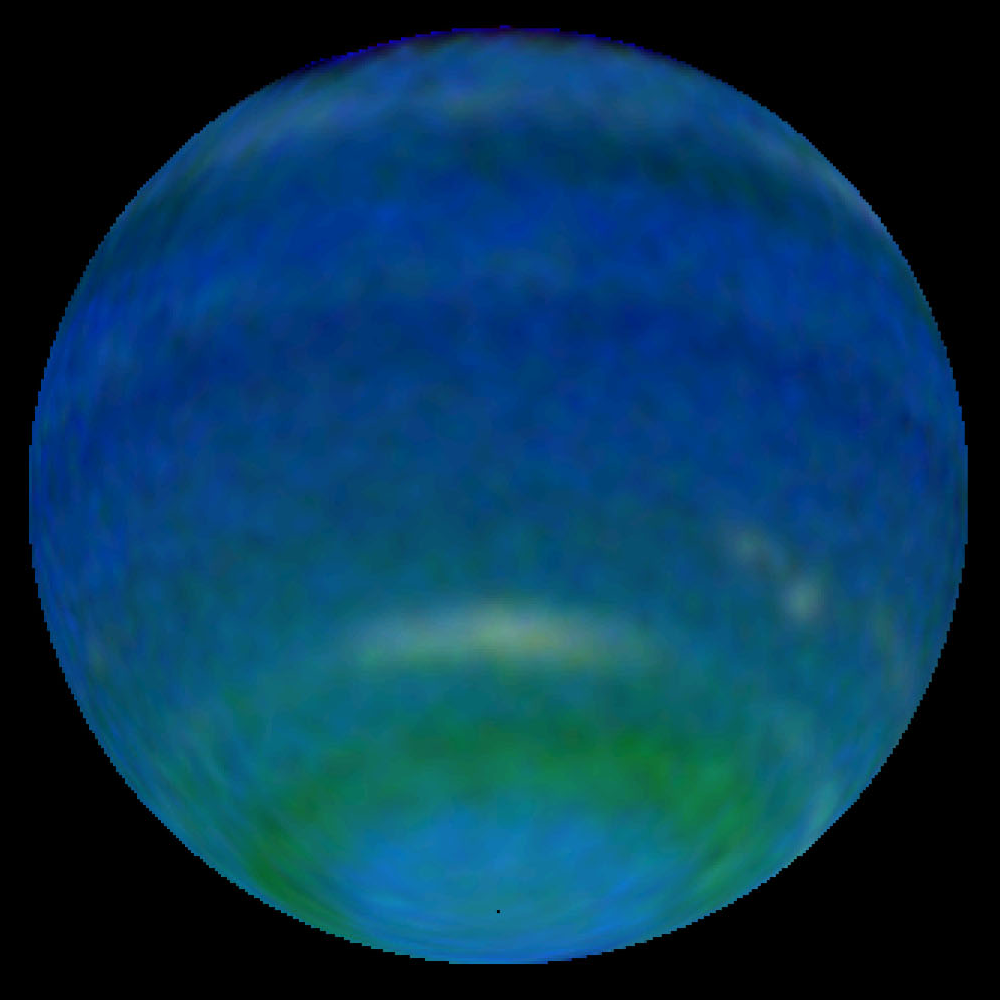

Springtime on Neptune - 1996 Image of Neptune

Springtime is blooming on Neptune! This might sound like an oxymoron because Neptune is the farthest and coldest of the major planets. But observations by NASA's Hubble Space Telescope reveal an increase in Neptune's brightness in the southern hemisphere. Astronomers consider this increase a harbinger of seasonal change.

Credit: NASA/ESA, L. Sromovsky, and P. Fry (University of Wisconsin-Madison)